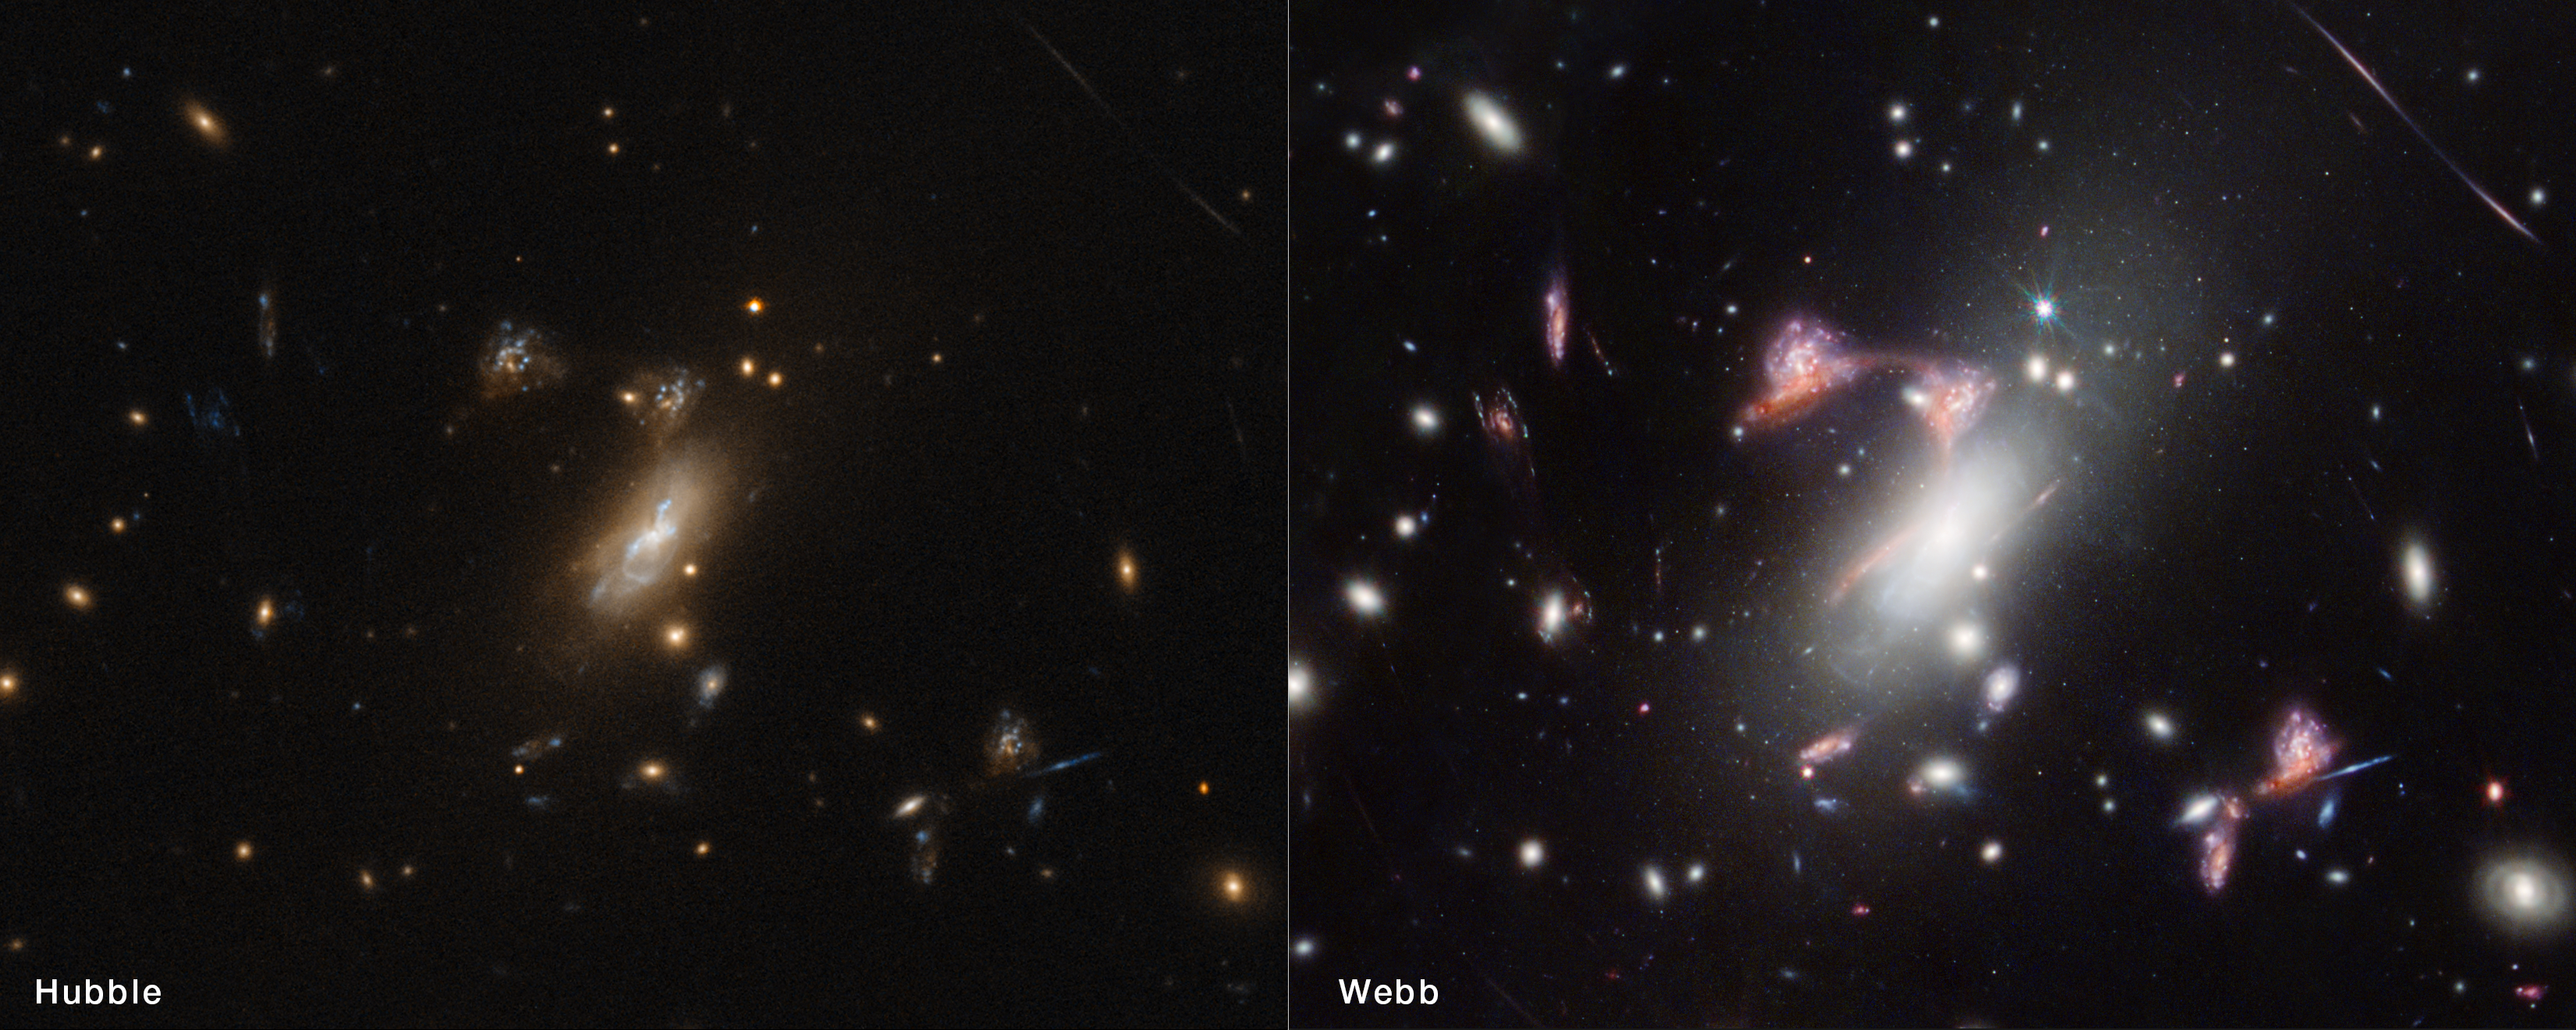

Question Mark Galaxy – Hubble and Webb

NASA’s Hubble Space Telescope has also observed the galaxy cluster MACS-J0417.5-1154, but the dusty red galaxy that appears multiple times to form a question mark shape is much more prominent in the Webb image. The infrared light that Webb detects is better able to pass through the cosmic dust of its home galaxy to reach the telescope. Astronomers used Hubble’s ultraviolet observations to help determine where star formation is happening in both the red galaxy and its close companion, a face-on spiral galaxy.

Credit: NASA, ESA, CSA, STScI, V. Estrada-Carpenter (Saint Mary’s University)